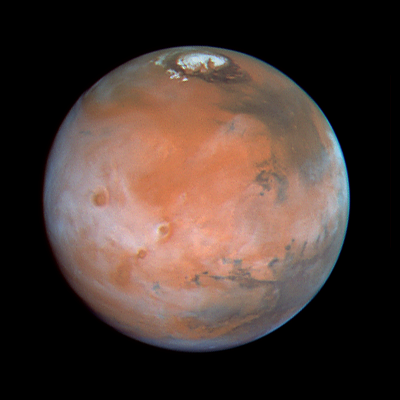

Comparison View of Mars Cloud Cover

The colour composite (left image) is constructed from three images taken in red (673 nanometers), green (502 nm) and blue (410 nm) light.

Credit: Phil James (Univ. Toledo), Todd Clancy (Space Science Inst., Boulder, CO), Steve Lee (Univ. Colorado), and NASA/ESA